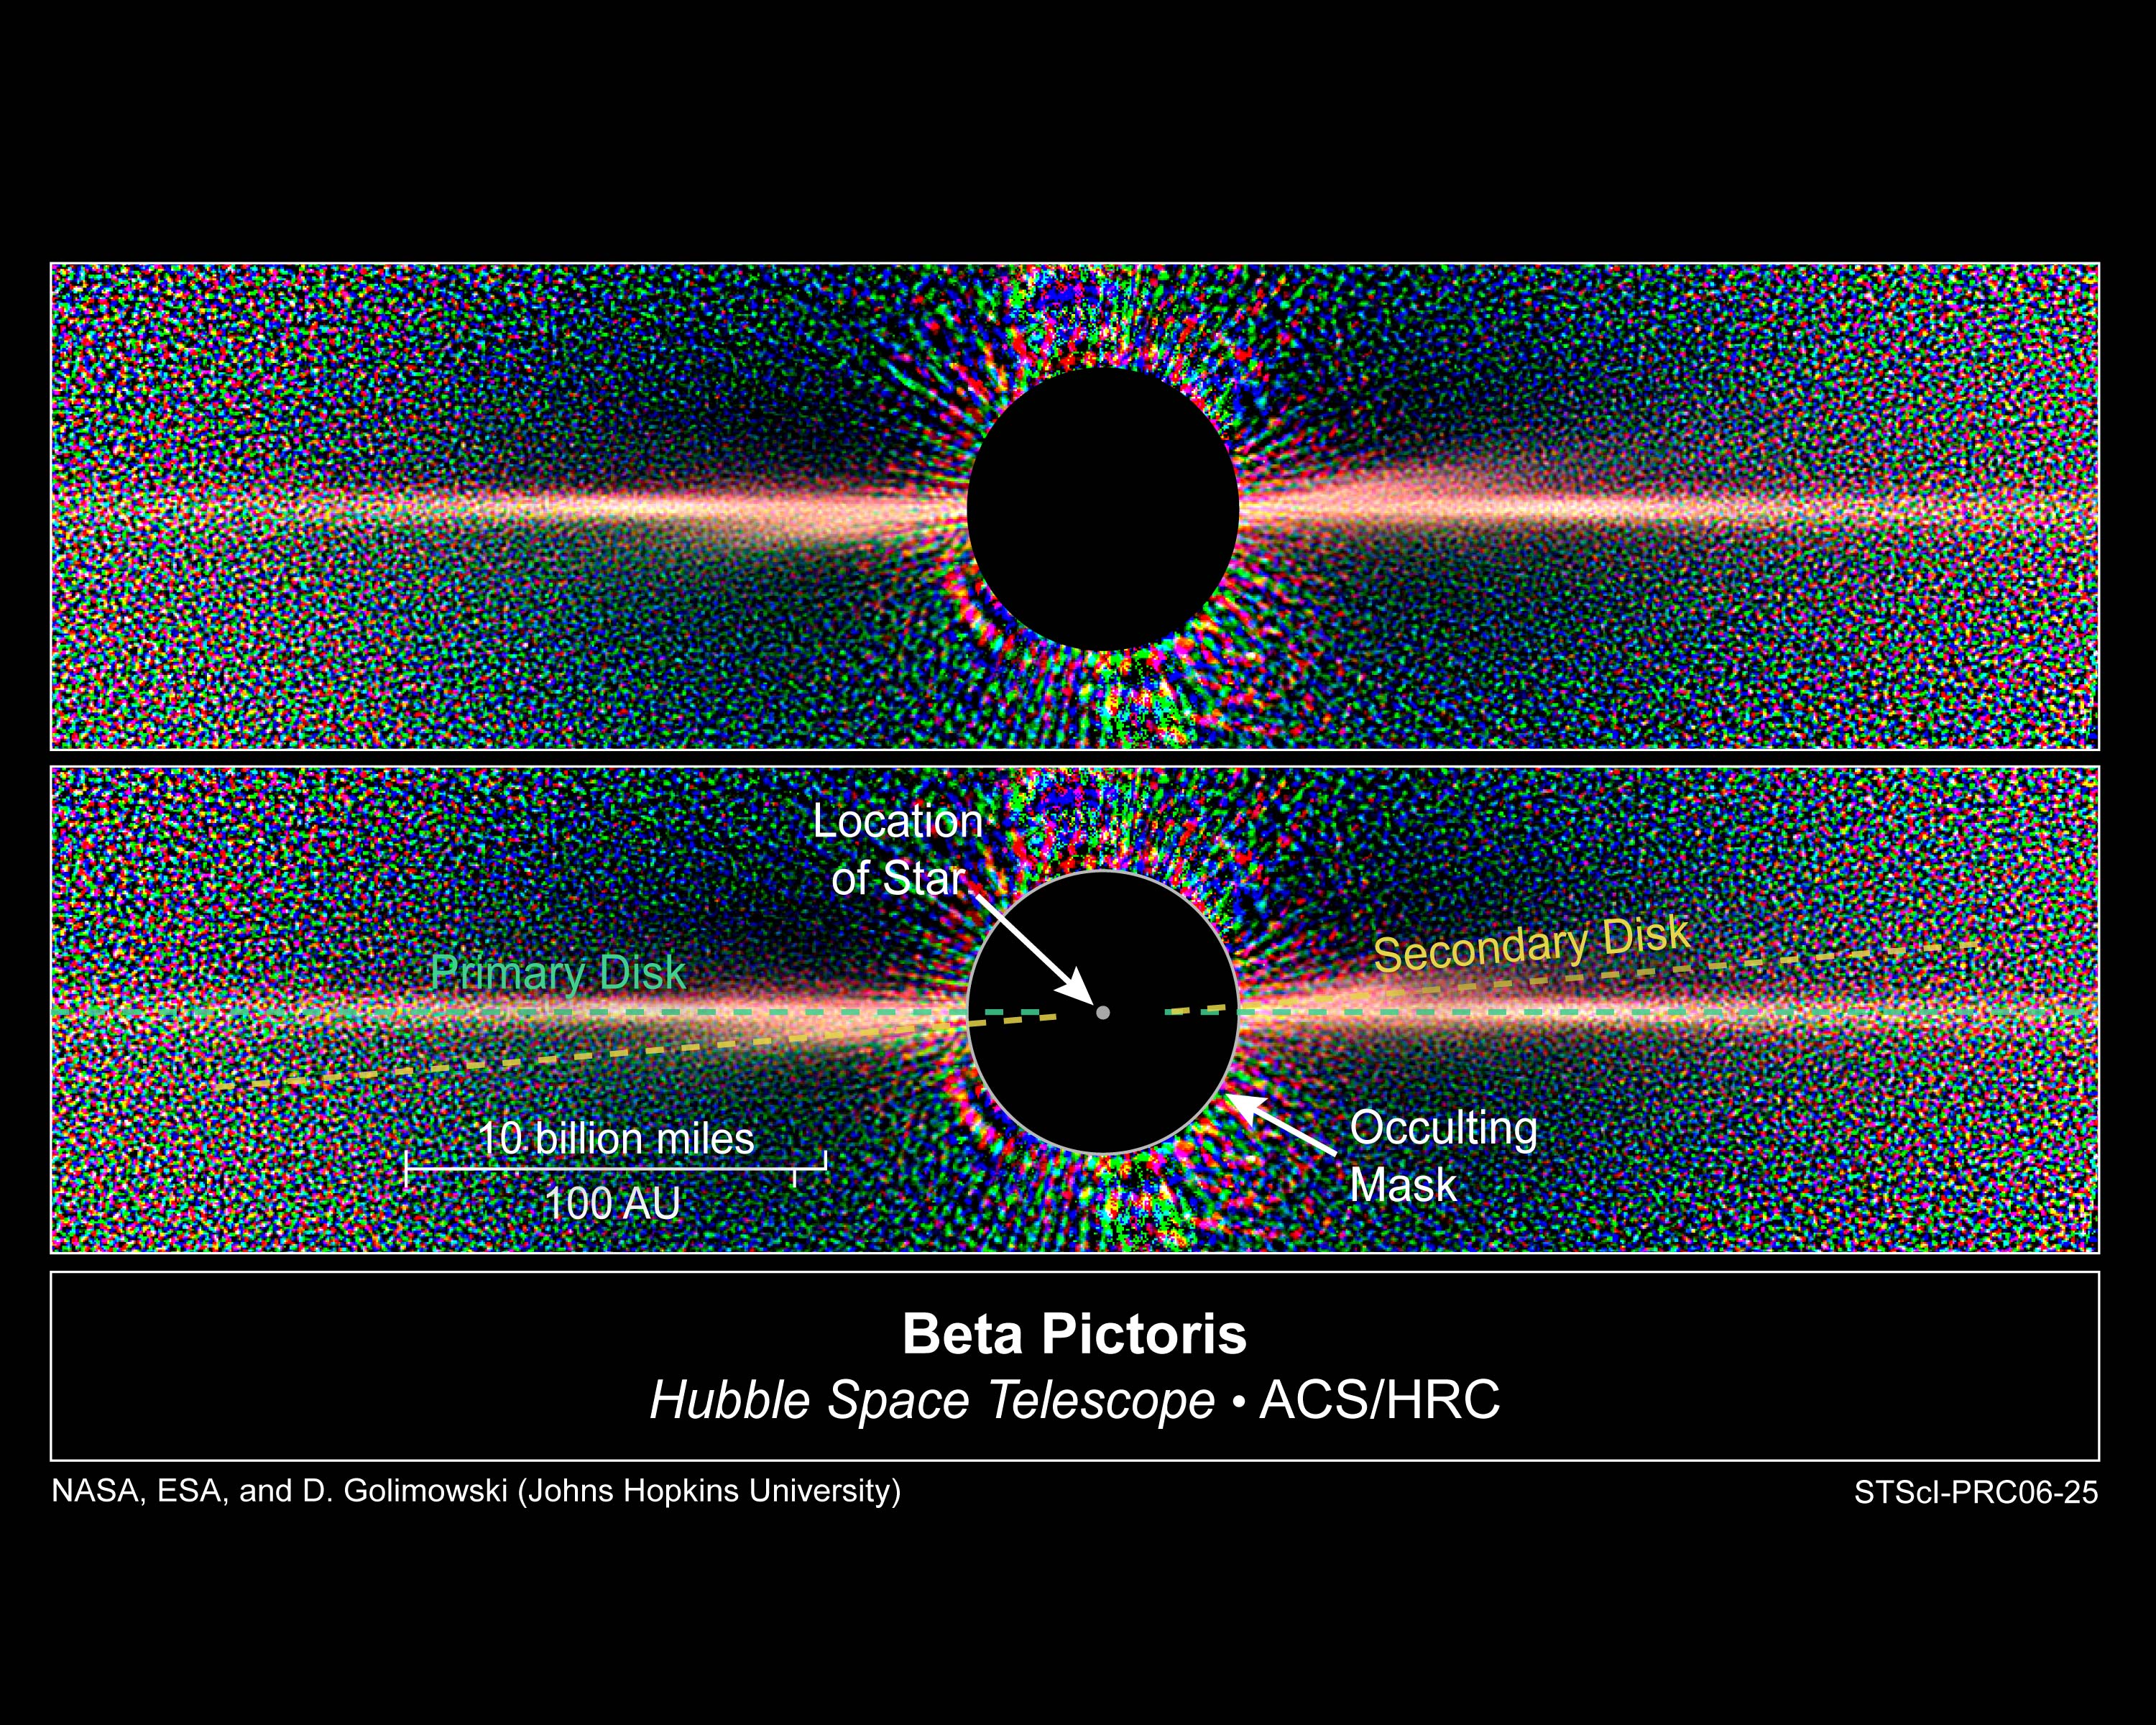

Hubble Reveals Two Dust Disks Around Nearby Star Beta Pictoris

Detailed images of the nearby star Beta Pictoris, taken by NASA/ESA Hubble Space Telescope, confirm the existence of not one but two dust disks encircling the star. The images offer tantalizing new evidence for at least one Jupiter-size planet orbiting Beta Pictoris.

The finding ends a decade of scientific speculation that an odd warp in the young star's debris disk may actually be another inclined disk. The recent Hubble Advanced Camera for Surveys view - the best visible-light image of Beta Pictoris - clearly shows a distinct secondary disk that is tilted by about 4 degrees from the main disk. The secondary disk is visible out to roughly 24 billion miles (almost 40 billion kilometres) from the star, and probably extends even farther, said astronomers. This Hubble image of Beta Pictoris clearly shows a primary dust disk and a much fainter secondary dust disk. Astronomers used the Advanced Camera's coronagraph to block out the light from the bright star.

Credit: NASA, ESA, D. Golimowski (Johns Hopkins University), D. Ardila (IPAC), J. Krist (JPL), M. Clampin (GSFC), H. Ford (JHU), and G. Illingworth (UCO/Lick) and the ACS Science Team